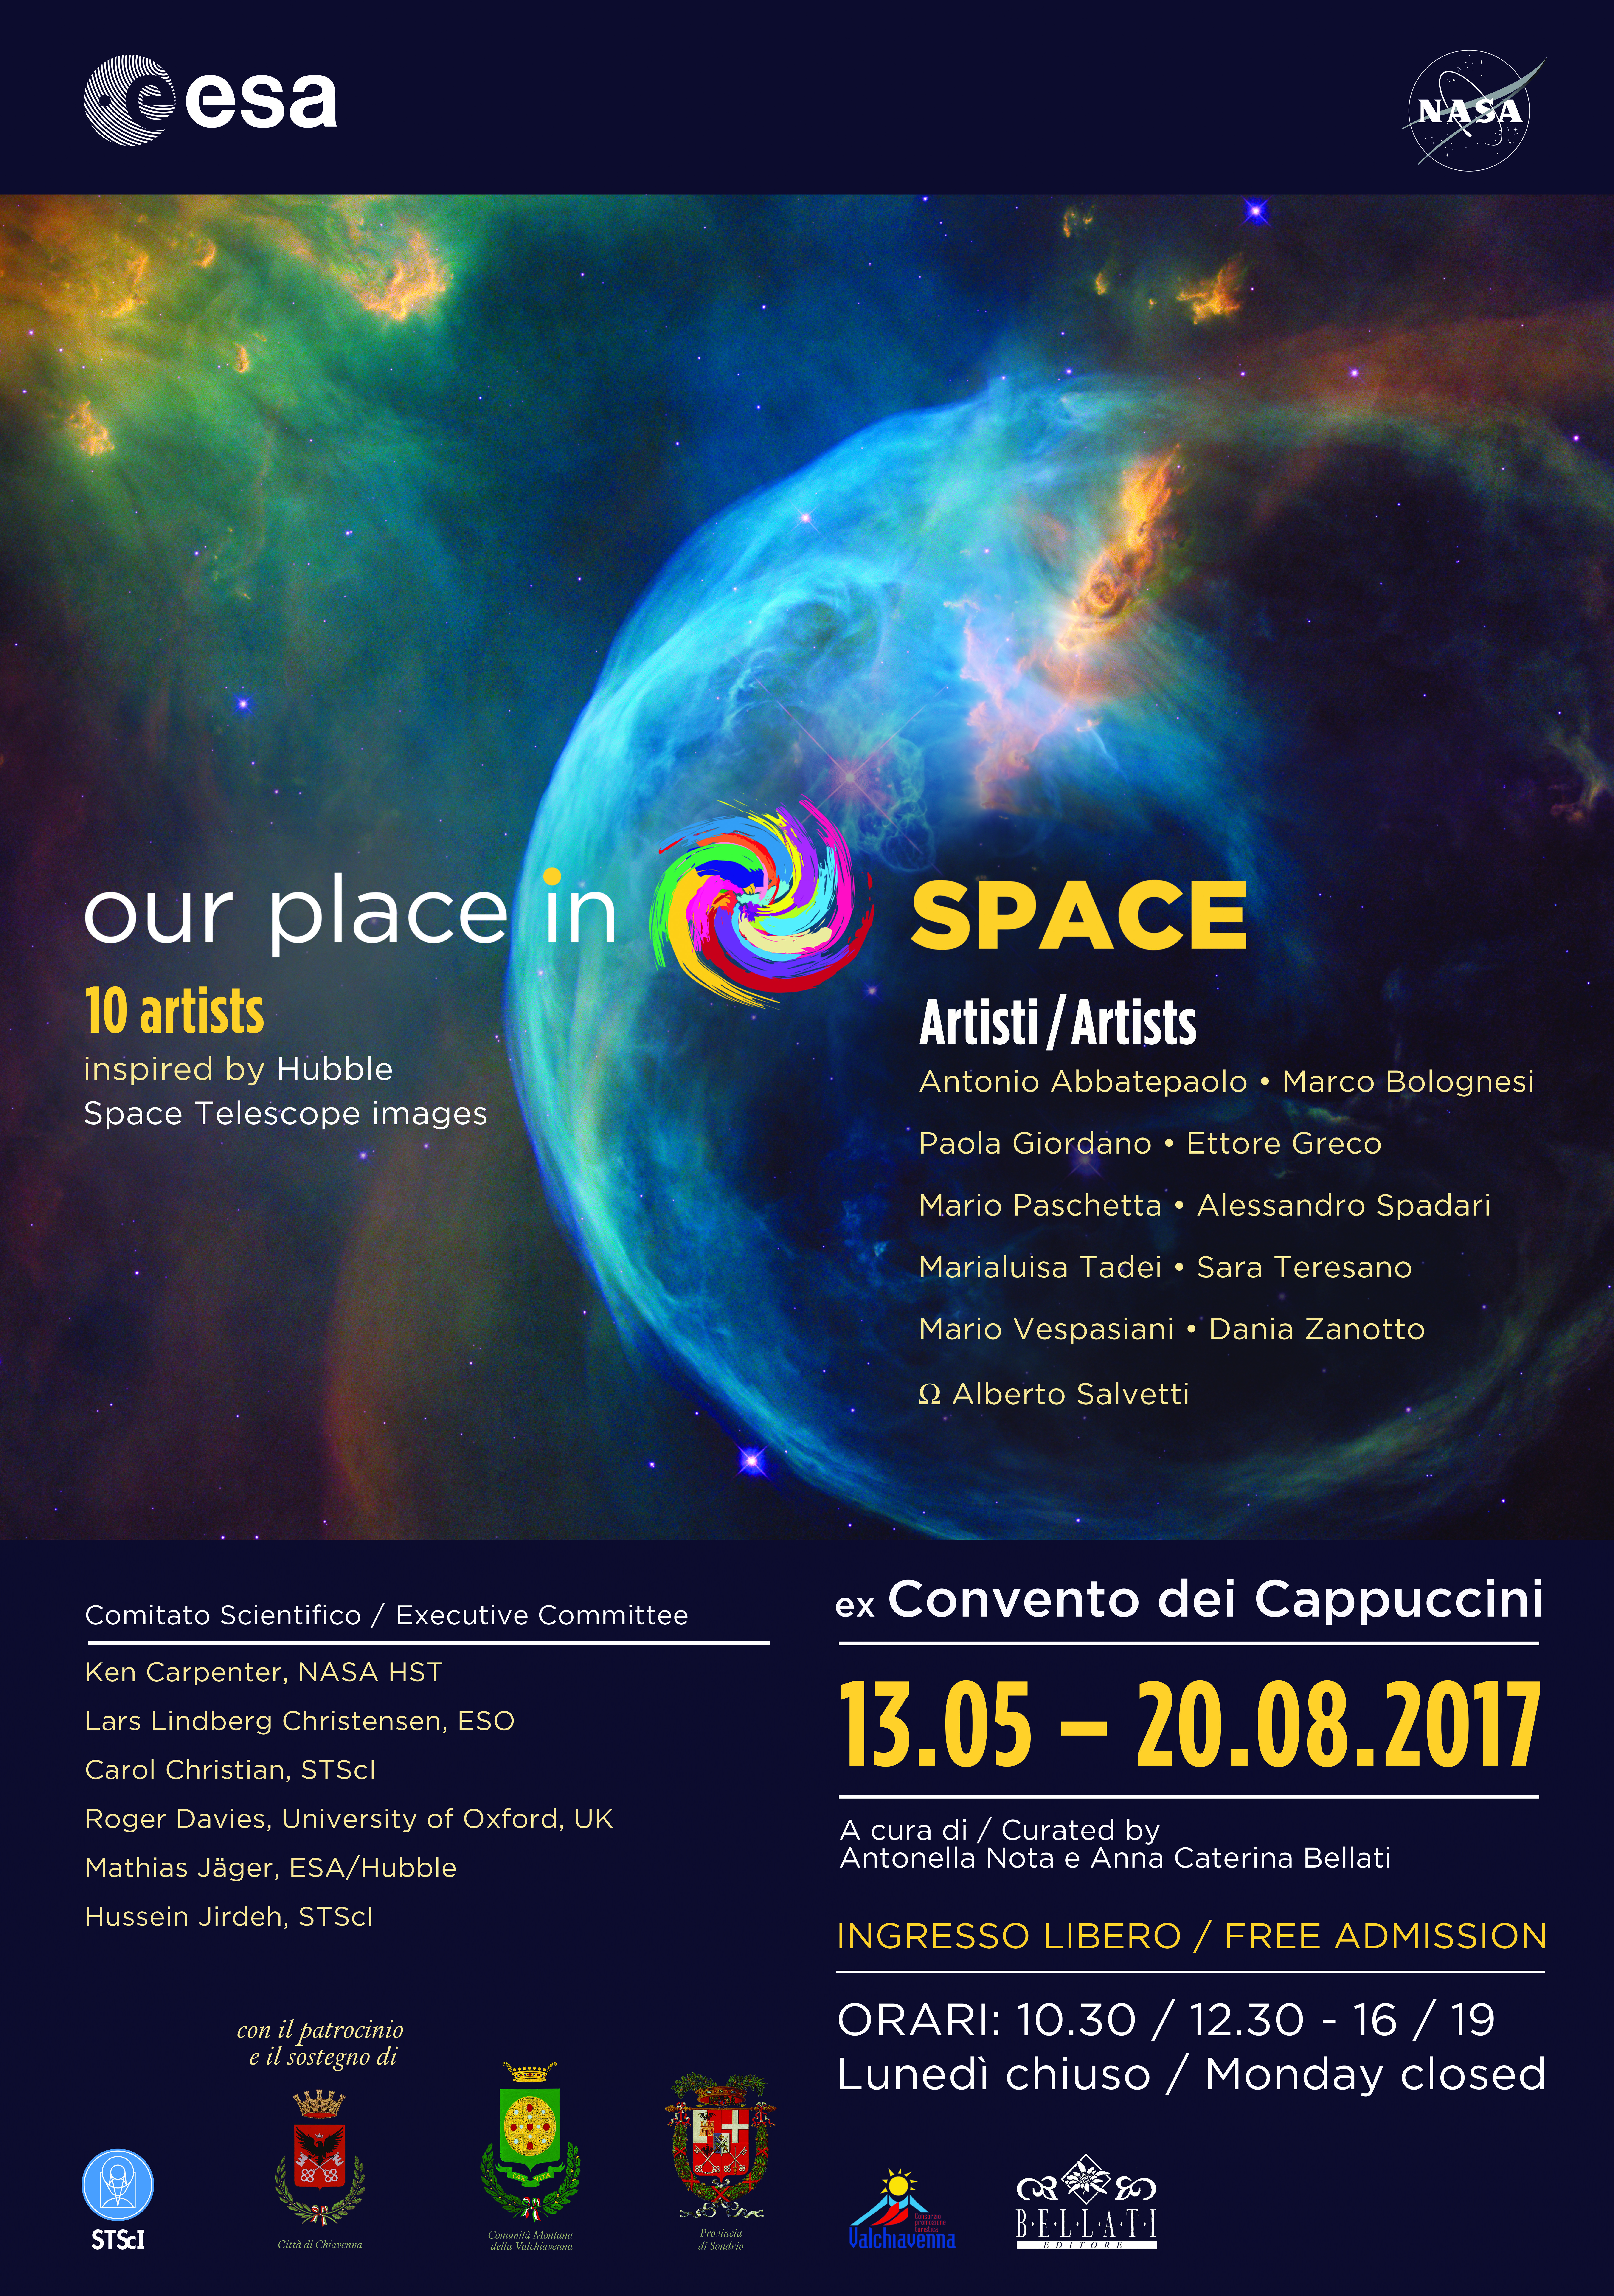

Our Place in Space banner — Chiavenna

This is the official poster for the travelling exhibition Our Place in Space, displayed at the Convento dei Cappuccini in Chiavenna, Italy. The Convento dei Cappuccini will host the exhibition from 13 May 2017 until 20 August 2017.

Credit: ESA/Hubble, NASA, P. Jeffries